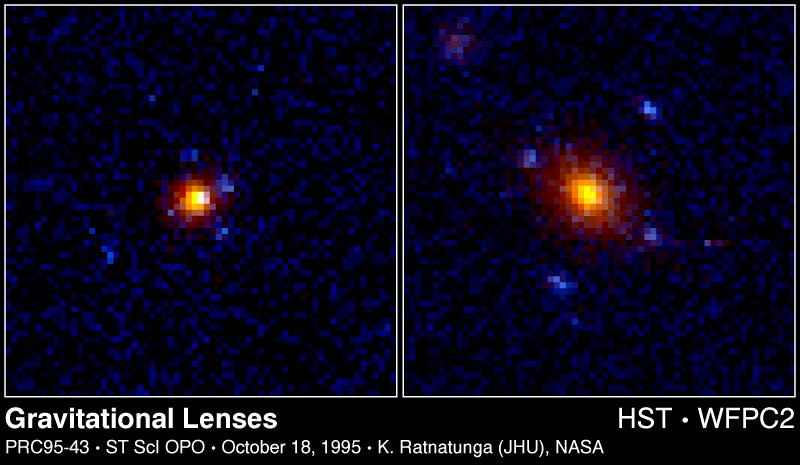

Gravitational Lenses

These two objects represent a new distant class of quadruple, or cross-shaped, gravitational lenses which might eventually provide astronomers with a powerful new 'magnifying glass' for probing a variety of characteristics of the universe.

Credit: Kavan Ratnatunga (Johns Hopkins University, Baltimore, MD)